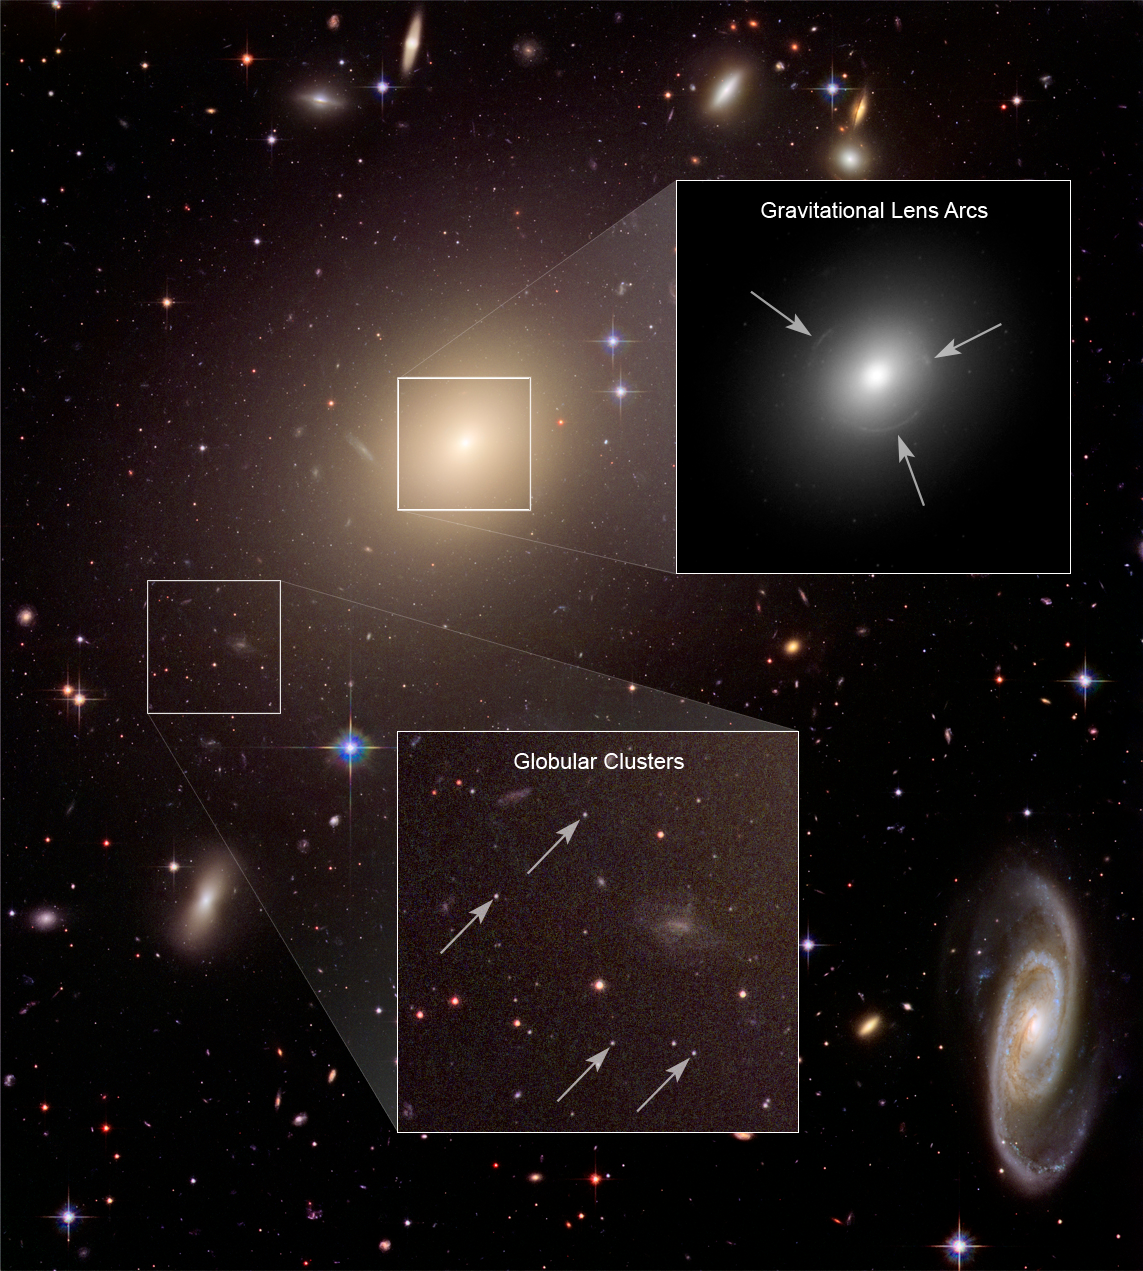

ESO 325-G004: detailing the big picture

Evident from the Hubble image is the fact that ESO 325-G004 is home to thousands of globular clusters, small compact groups of hundreds of thousands of stars that are gravitationally bound systems. These clusters are dispersed spherically and uniformly in the outer halo of the elliptical and make their way around the center of the galaxy over the course of millions of years. Several foreground stars and background galaxies are also visible within the halo of this bright galaxy.

Credit: NASA, ESA, and Z. Levay (STScI)